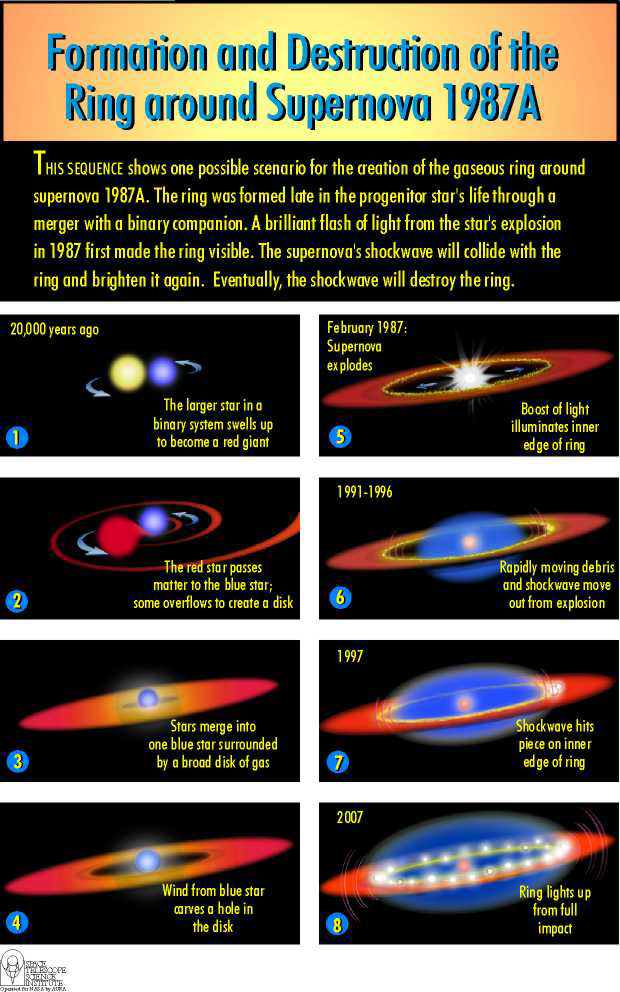

SN debris colliding with inner ring

Sequence showing one possible method of the formation of a ring around Supernova 1987A.

Credit: NASA & ESA